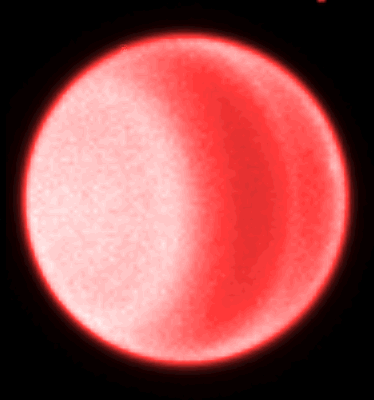

Hubble Spots Northern Hemispheric Clouds On Uranus

The 'red' image is taken at 6, 190 Angstroms, and is sensitive to absorption by methane molecules in the planet's atmosphere. The banded structure of Uranus is evident, and the small cloud near the northern limb is now visible.

Credit: Heidi Hammel (Massachusetts Institute of Technology), and NASA/ESA